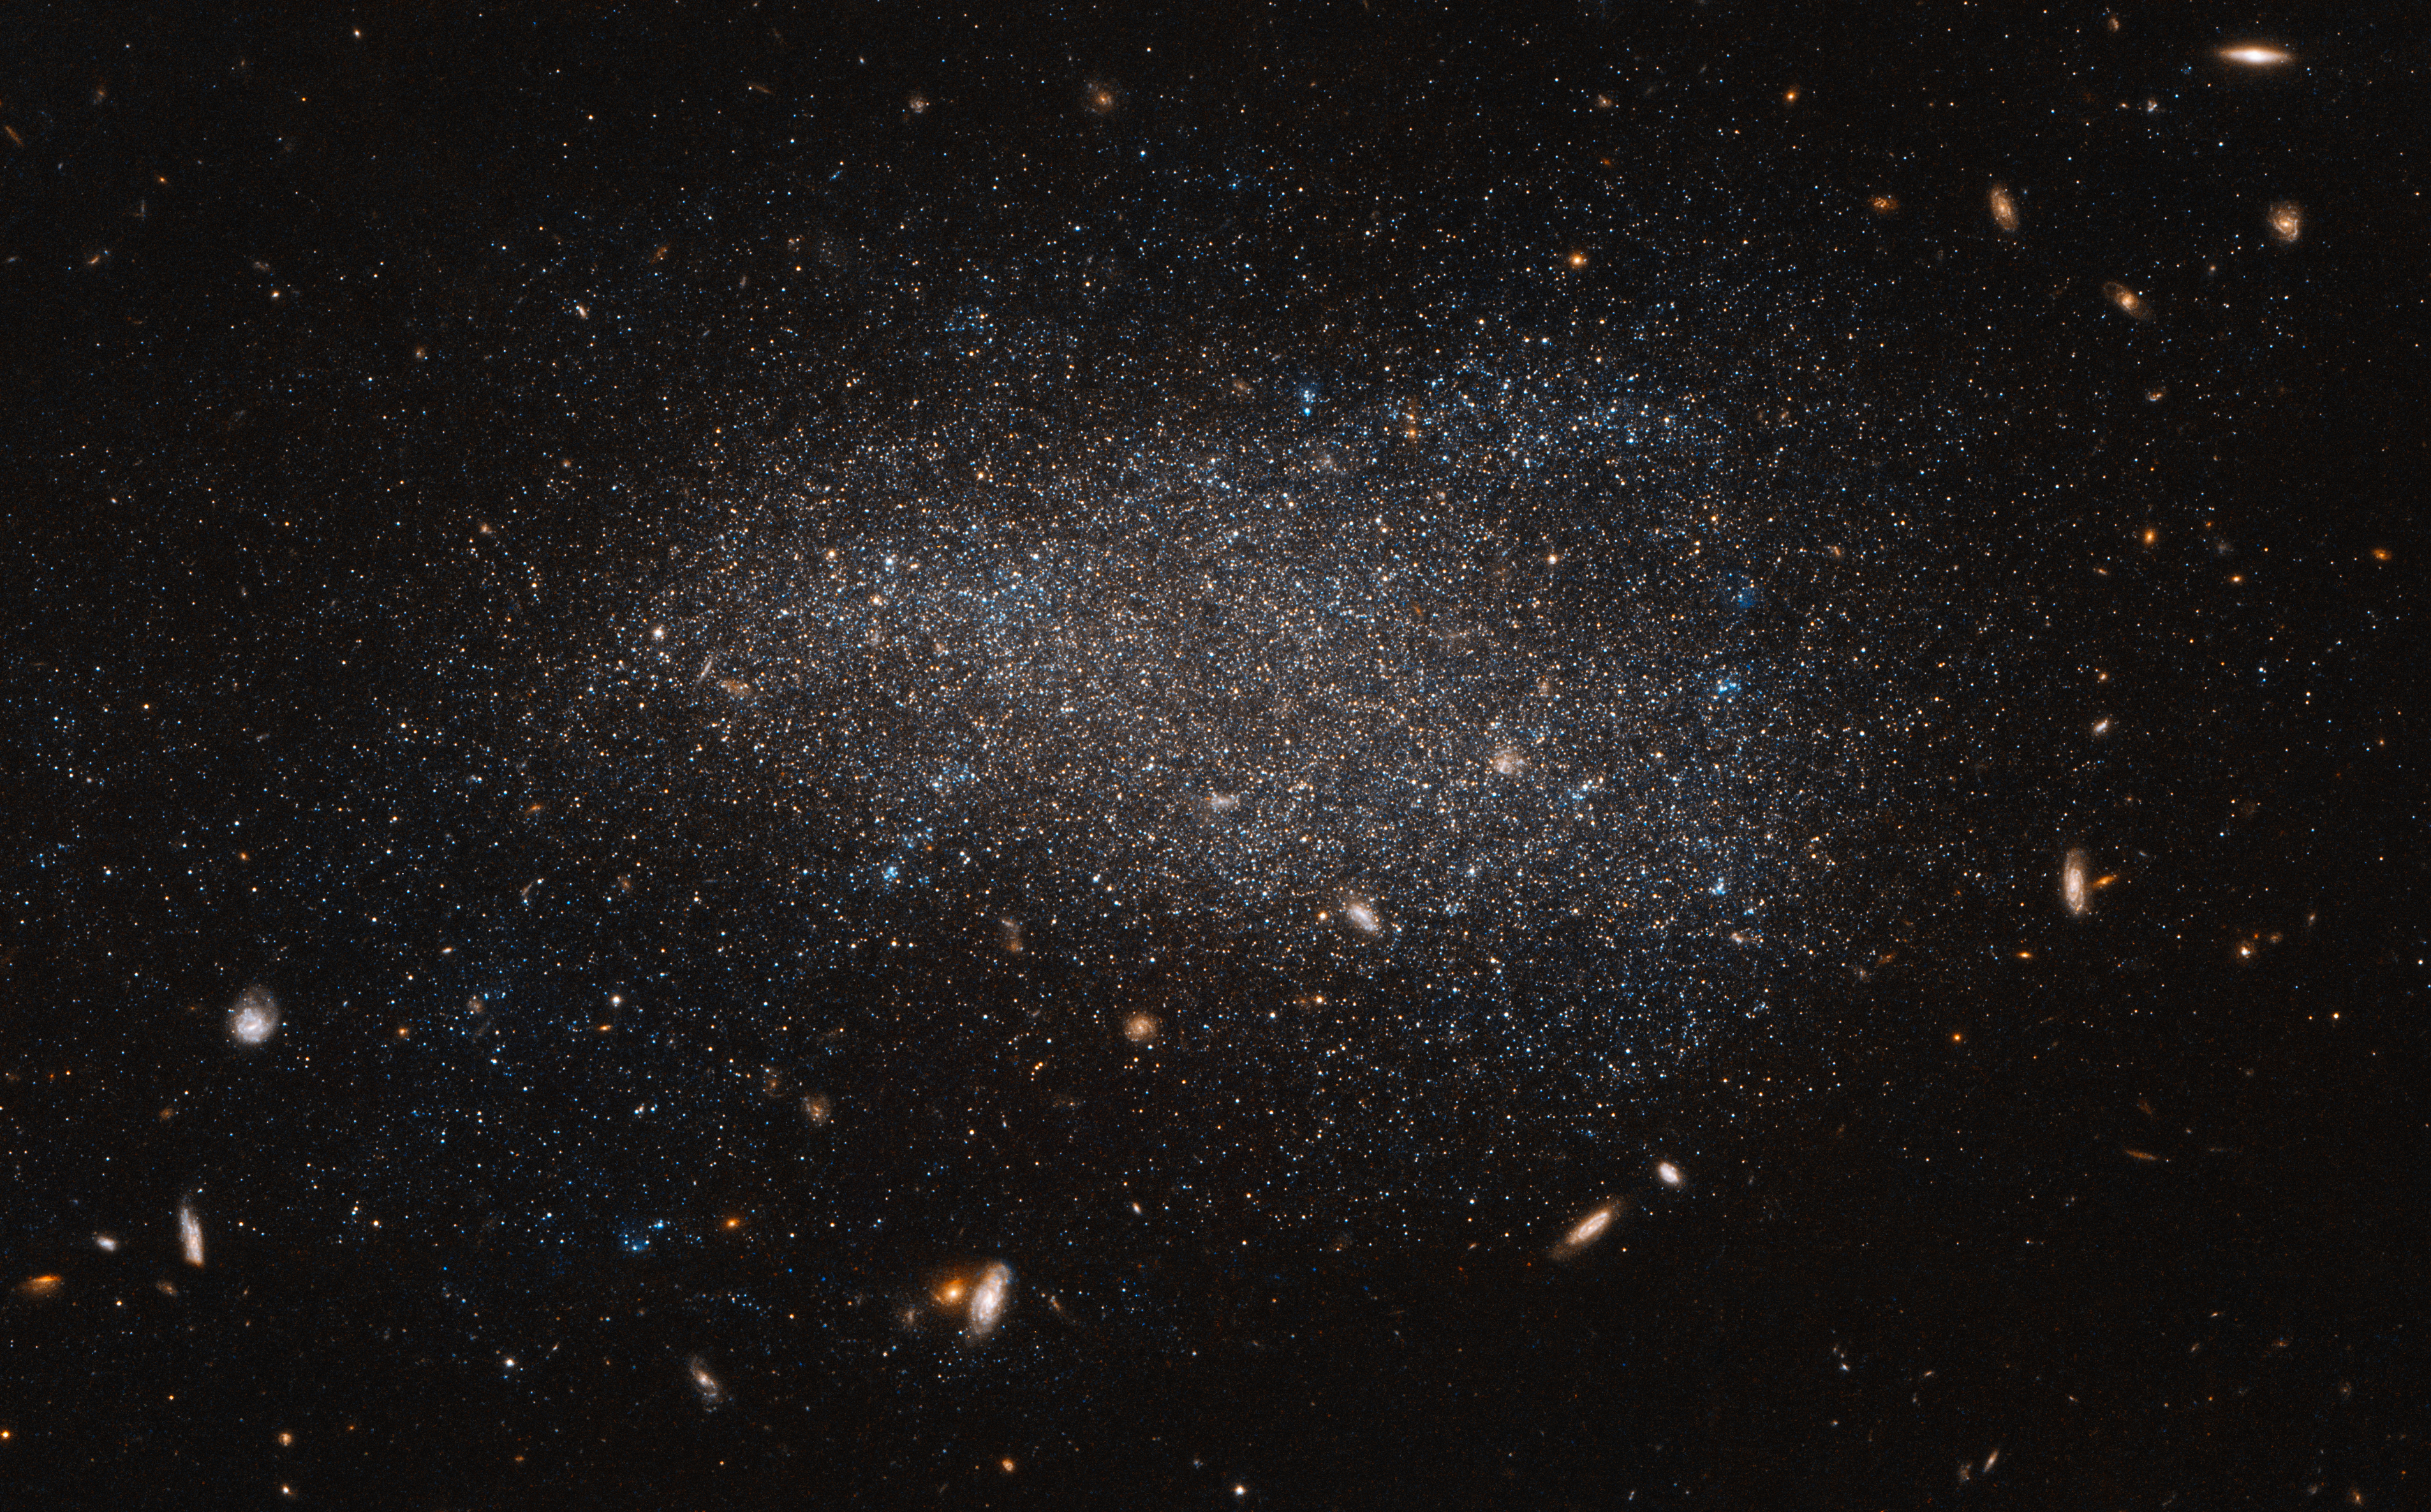

A subtle swarm

This Hubble image shows NGC 4789A, a dwarf irregular galaxy in the constellation of Coma Berenices. It certainly lives up to its name — the stars that call this galaxy home are smeared out across the sky in an apparently disorderly and irregular jumble, giving NGC 4789A a far more subtle and abstract appearance than its glitzy spiral and elliptical cousins.

These stars may look as if they have been randomly sprinkled on the sky, but they are all held together by gravity. The colours in this image have been deliberately exaggerated to emphasise the mix of blue and red stars. The blue stars are bright, hot and massive stars that have formed relatively recently, whereas the red stars are much older. The presence of both tells us that stars have been forming in this galaxy throughout its history.

At a distance of just over 14 million light-years away NGC 4789A is relatively close to us, allowing us to see many of the individual stars within its bounds. This image also reveals numerous other galaxies, far more distant, that appear as fuzzy shapes spread across the image.

Credit: ESA/Hubble & NASA
Acknowledgements: Judy Schmidt (Geckzilla)